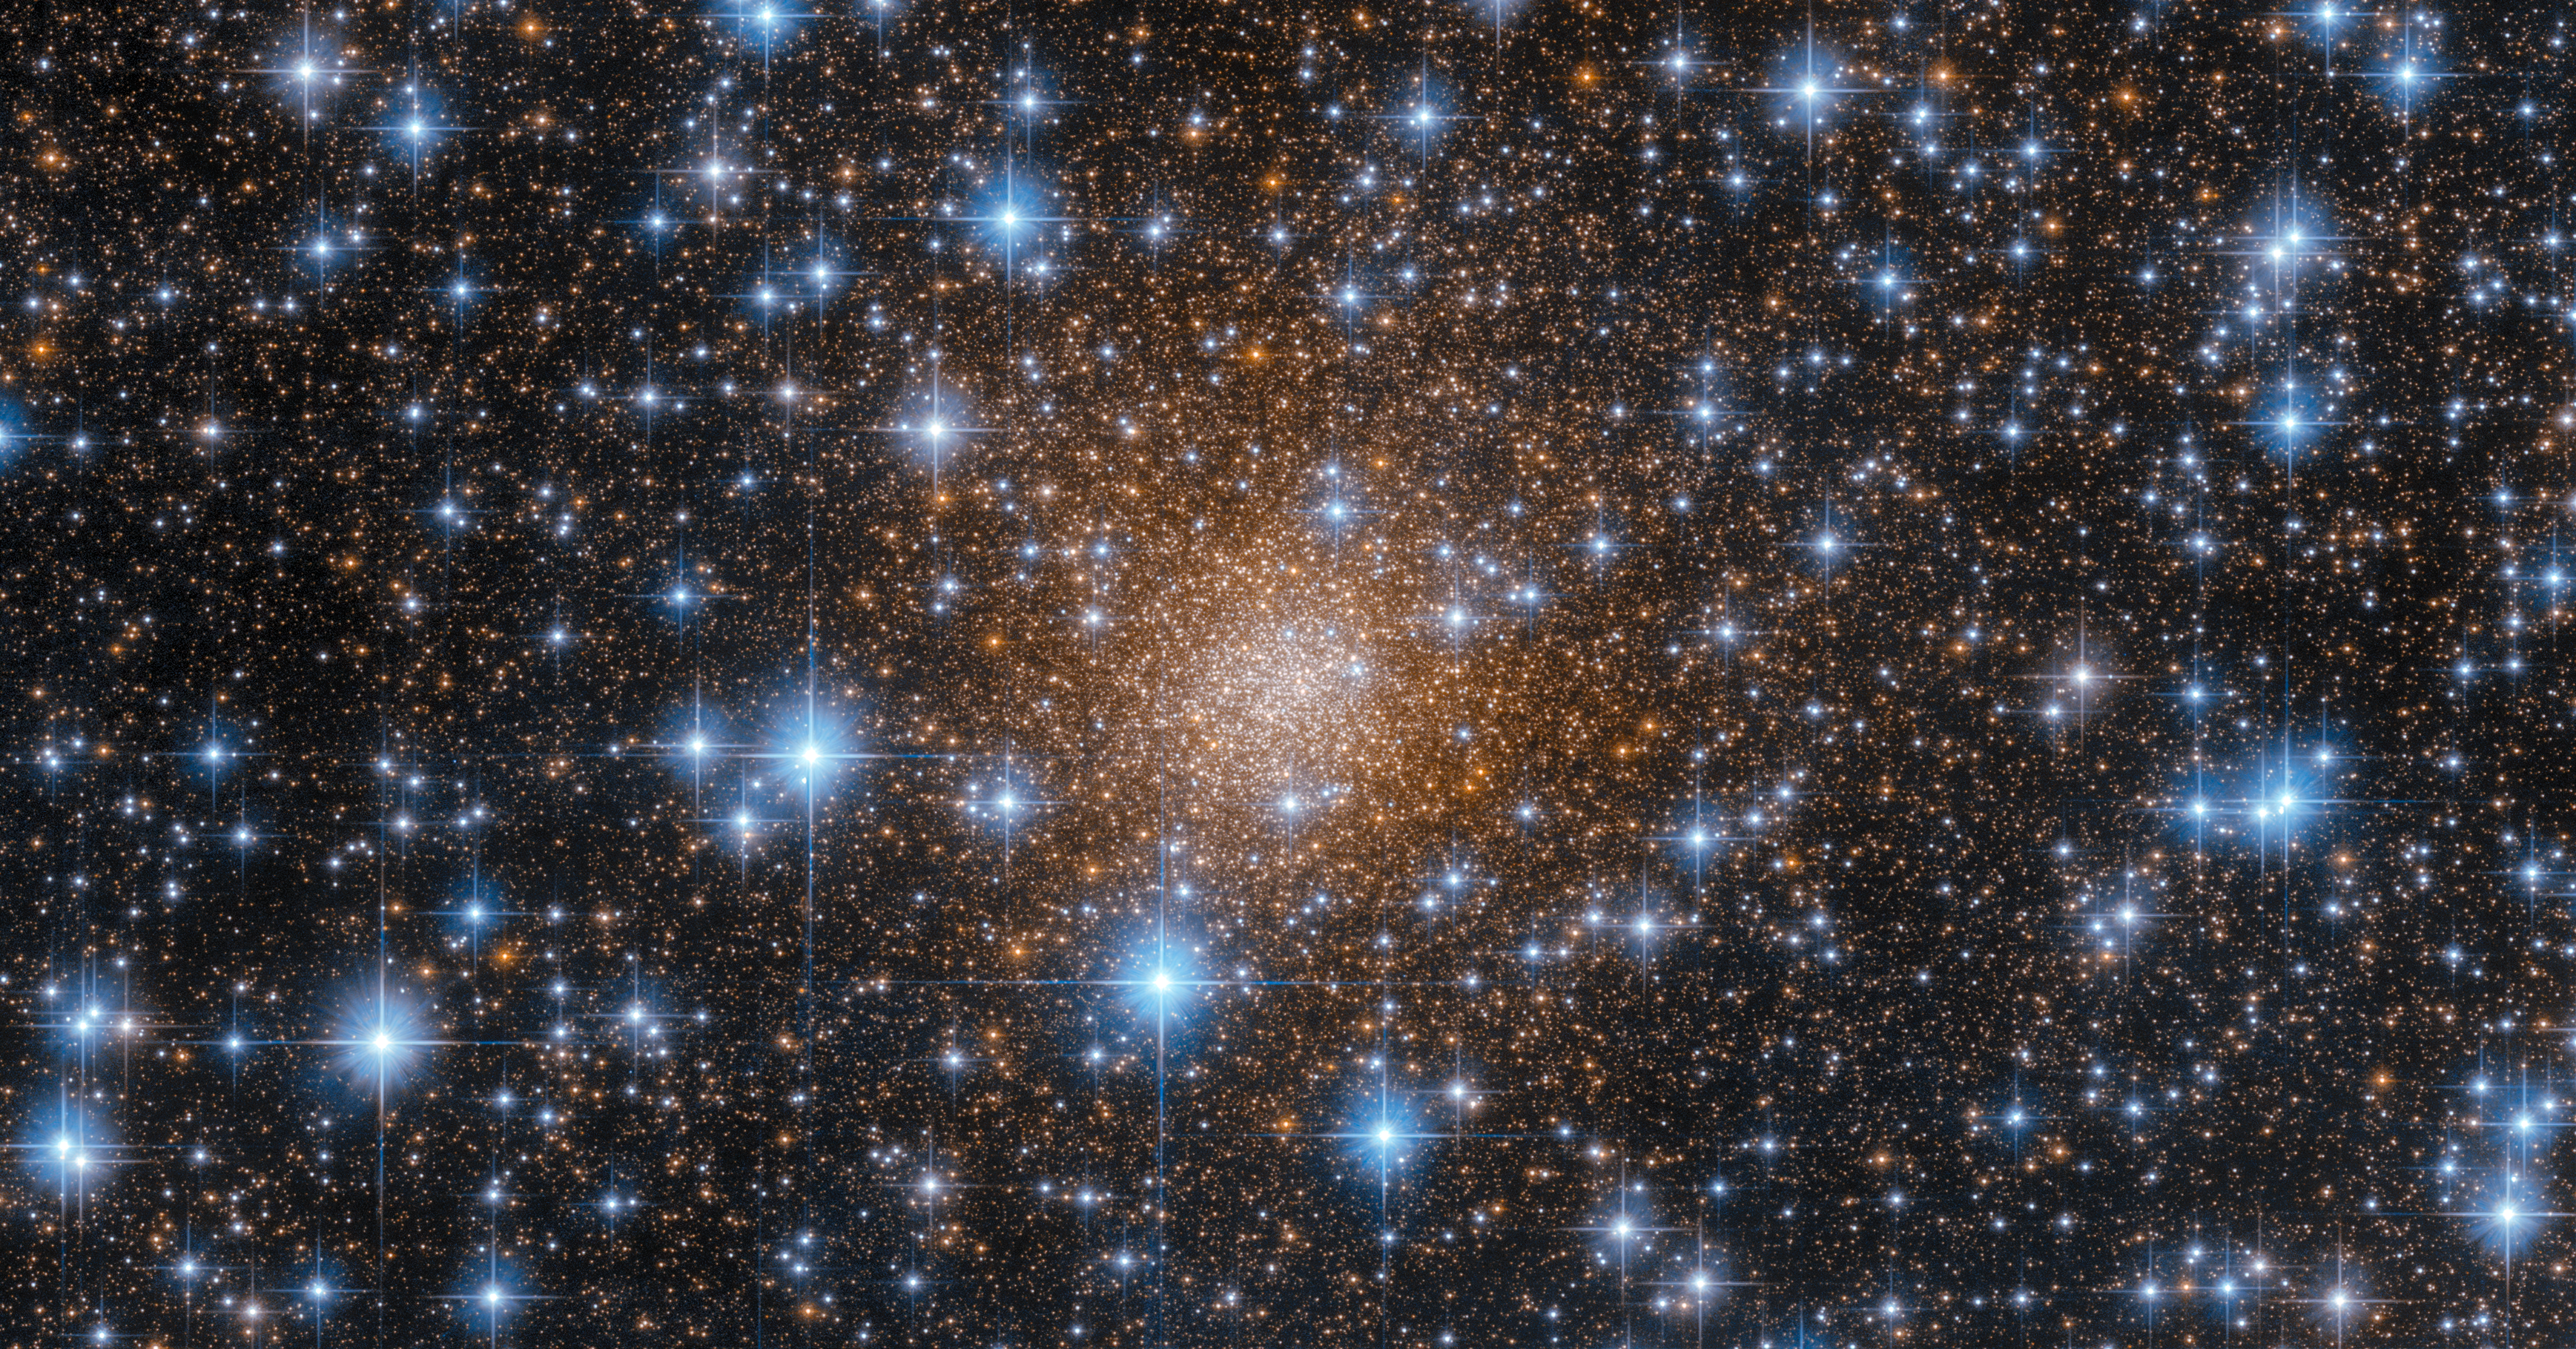

Hiding in Plain Sight

The muted red tones of the globular cluster Liller 1 are partially obscured in this image by a dense scattering of piercingly blue stars. In fact, it is thanks to Hubble’s Wide Field Camera 3 (WFC3) that we are able to see Liller 1 so clearly in this image, because the WFC3 is sensitive to wavelengths of light that the human eye cannot detect. Liller 1 is only 30 000 light-years from Earth — relatively neighbourly in astronomical terms — but it lies within the Milky Way’s ‘bulge’, the dense and dusty region at our galaxy’s centre. Because of that, Liller 1 is heavily obscured from view by interstellar dust, which scatters visible light (particularly blue light) very effectively. Fortunately, some infrared and red visible light are able to pass through these dusty regions. WFC3 is sensitive to both visible and near-infrared (infrared that is close to the visible) wavelengths, allowing us to see through the obscuring clouds of dust, and providing this spectacular view of Liller 1.

Liller 1 is a particularly interesting globular cluster, because unlike most of its kind, it contains a mix of very young and very old stars. Globular clusters typically house only old stars, some nearly as old as the Universe itself. Liller1 instead contains at least two distinct stellar populations with remarkably different ages: the oldest one is 12 billion years old and the youngest component is just 1-2 billion years old. This led astronomers to conclude that this stellar system was able to form stars over an extraordinary long period of time.

Credit: ESA/Hubble & NASA, F. Ferraro